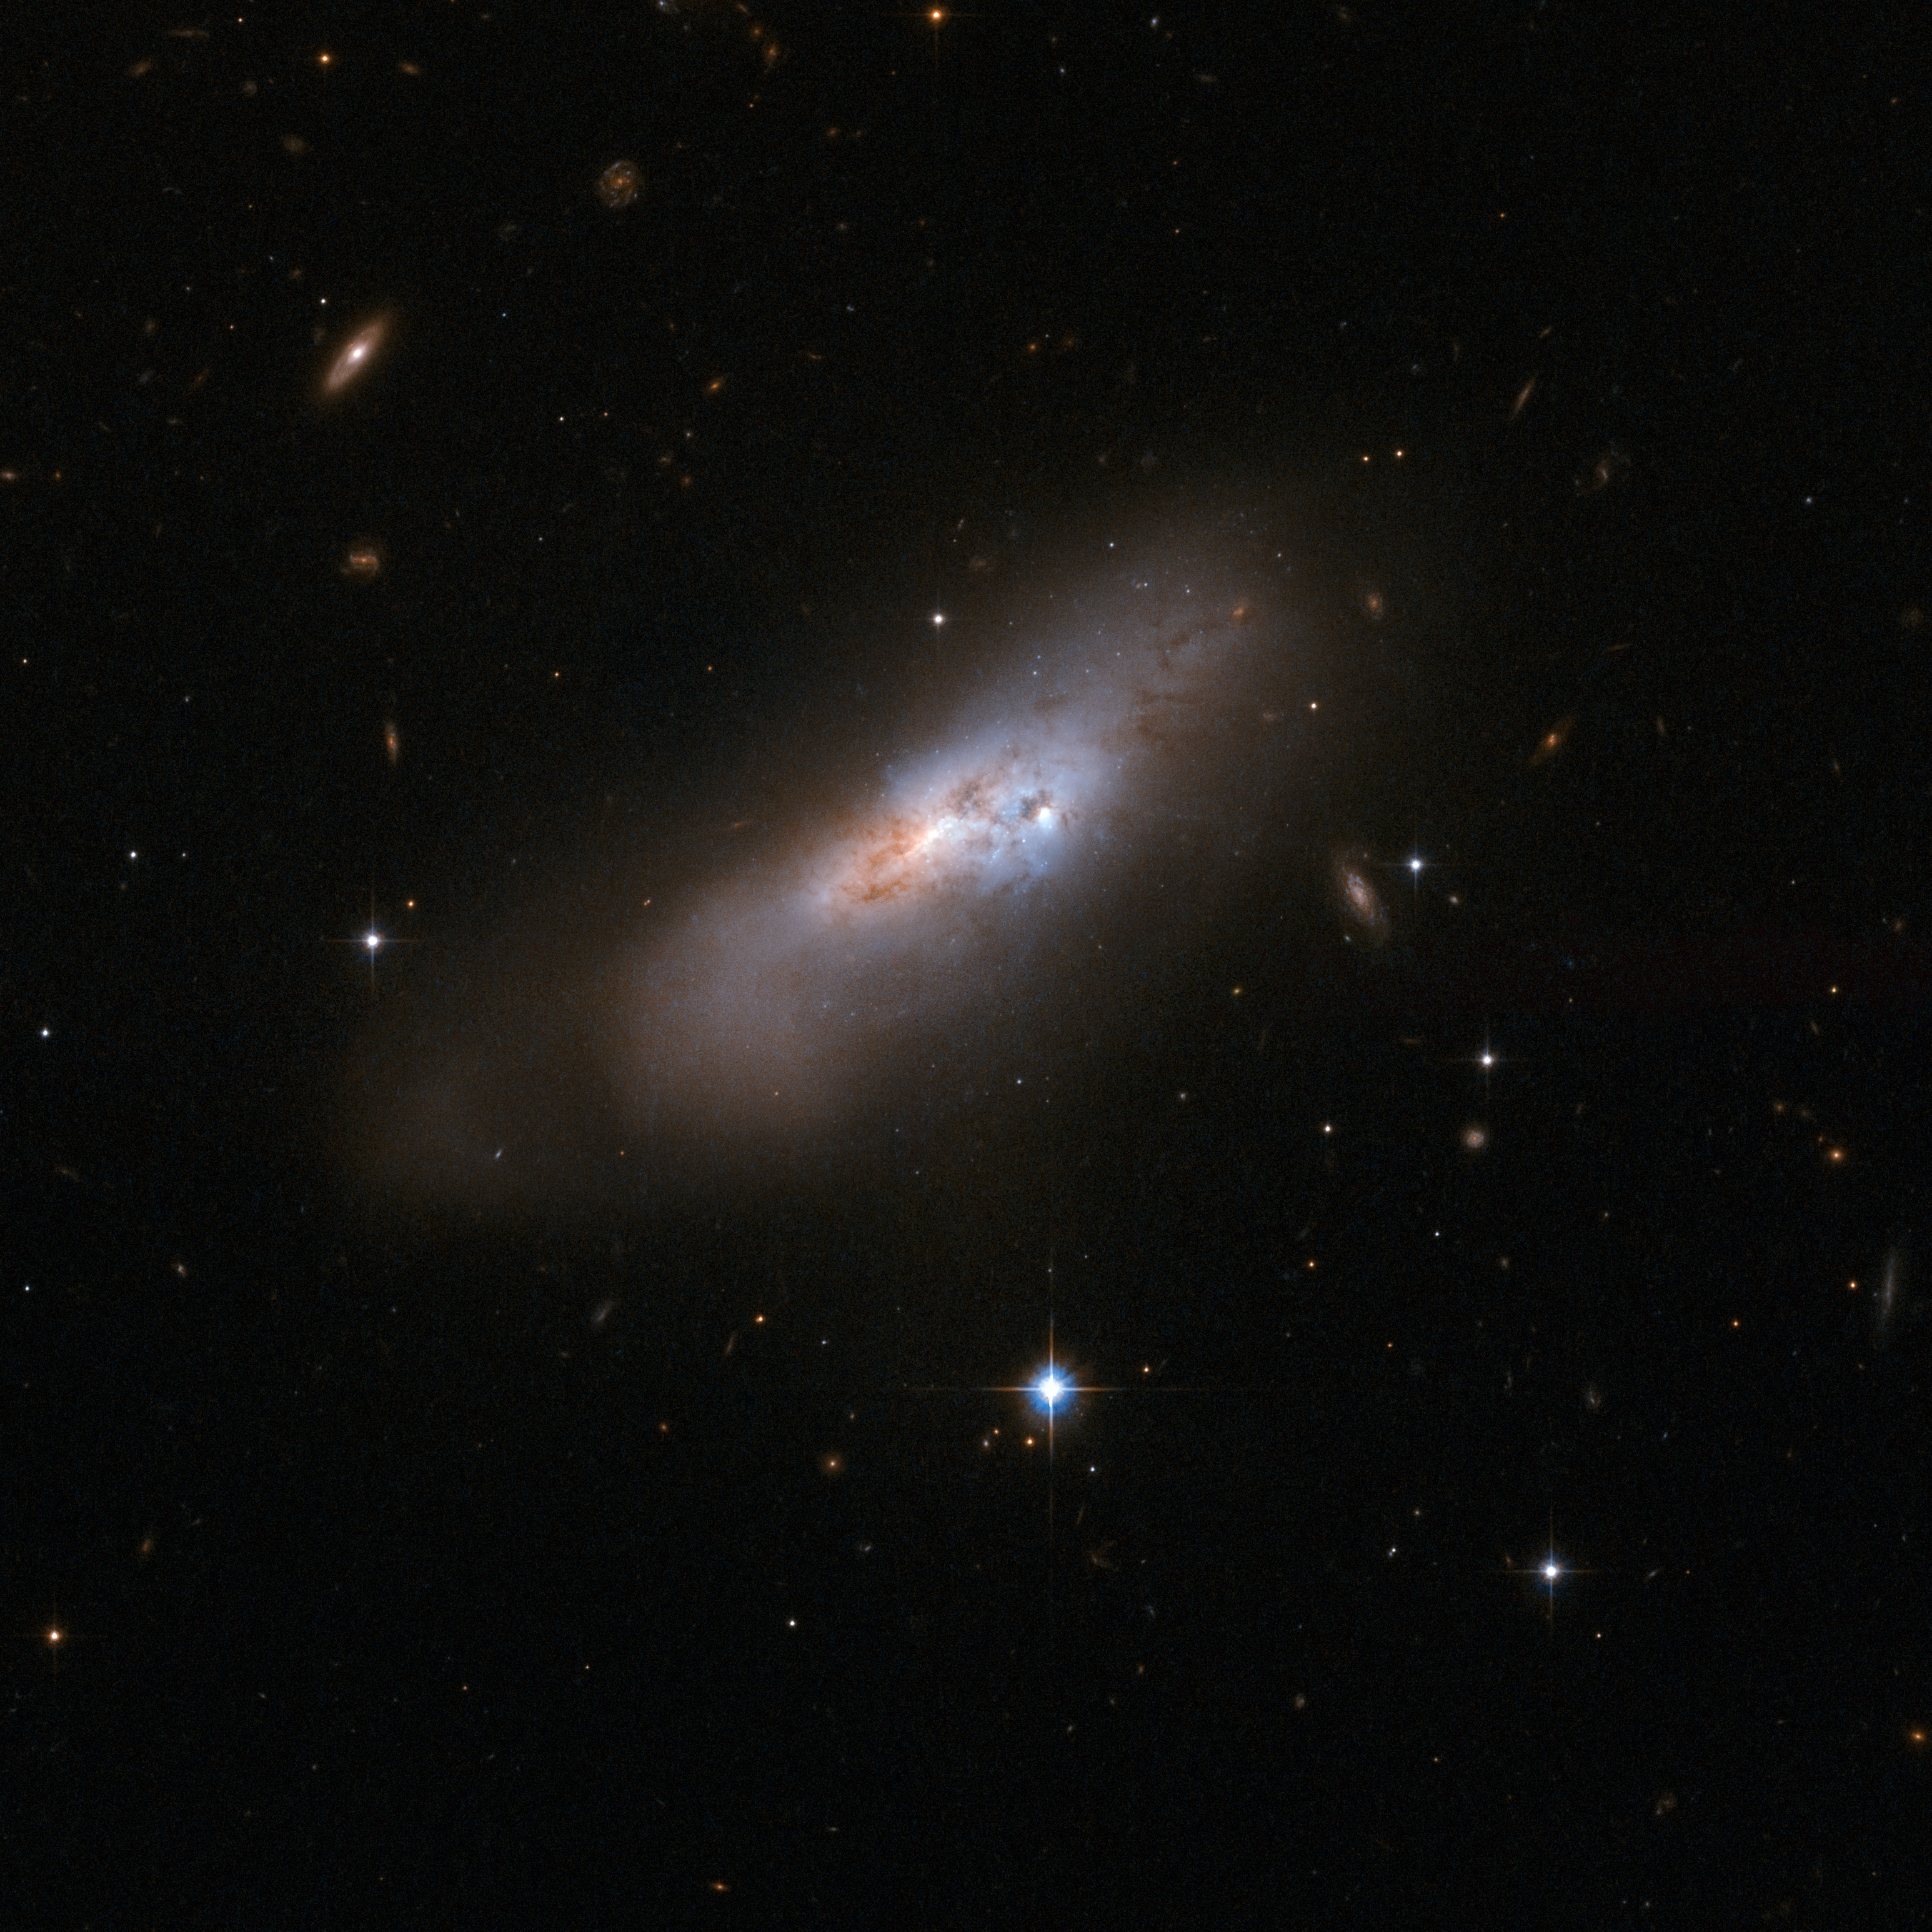

ESO 507-70

ESO 507-70 is an odd-looking galaxy that is probably the remnant of an earlier merger process. It is a chaotic swirl of gas, dust and stars with no sign of the conjectured original spiral or elliptical structure, now lost and distorted beyond recognition in a gravitational encounter with another galaxy. ESO 507-70 is some 300 million light-years away from Earth toward the constellation of Hydra, the Water Snake.

This image is part of a large collection of 59 images of merging galaxies taken by the Hubble Space Telescope and released on the occasion of its 18th anniversary on 24th April 2008.

Credit: NASA, ESA, the Hubble Heritage Team (STScI/AURA)-ESA/Hubble Collaboration and A. Evans (University of Virginia, Charlottesville/NRAO/Stony Brook University)